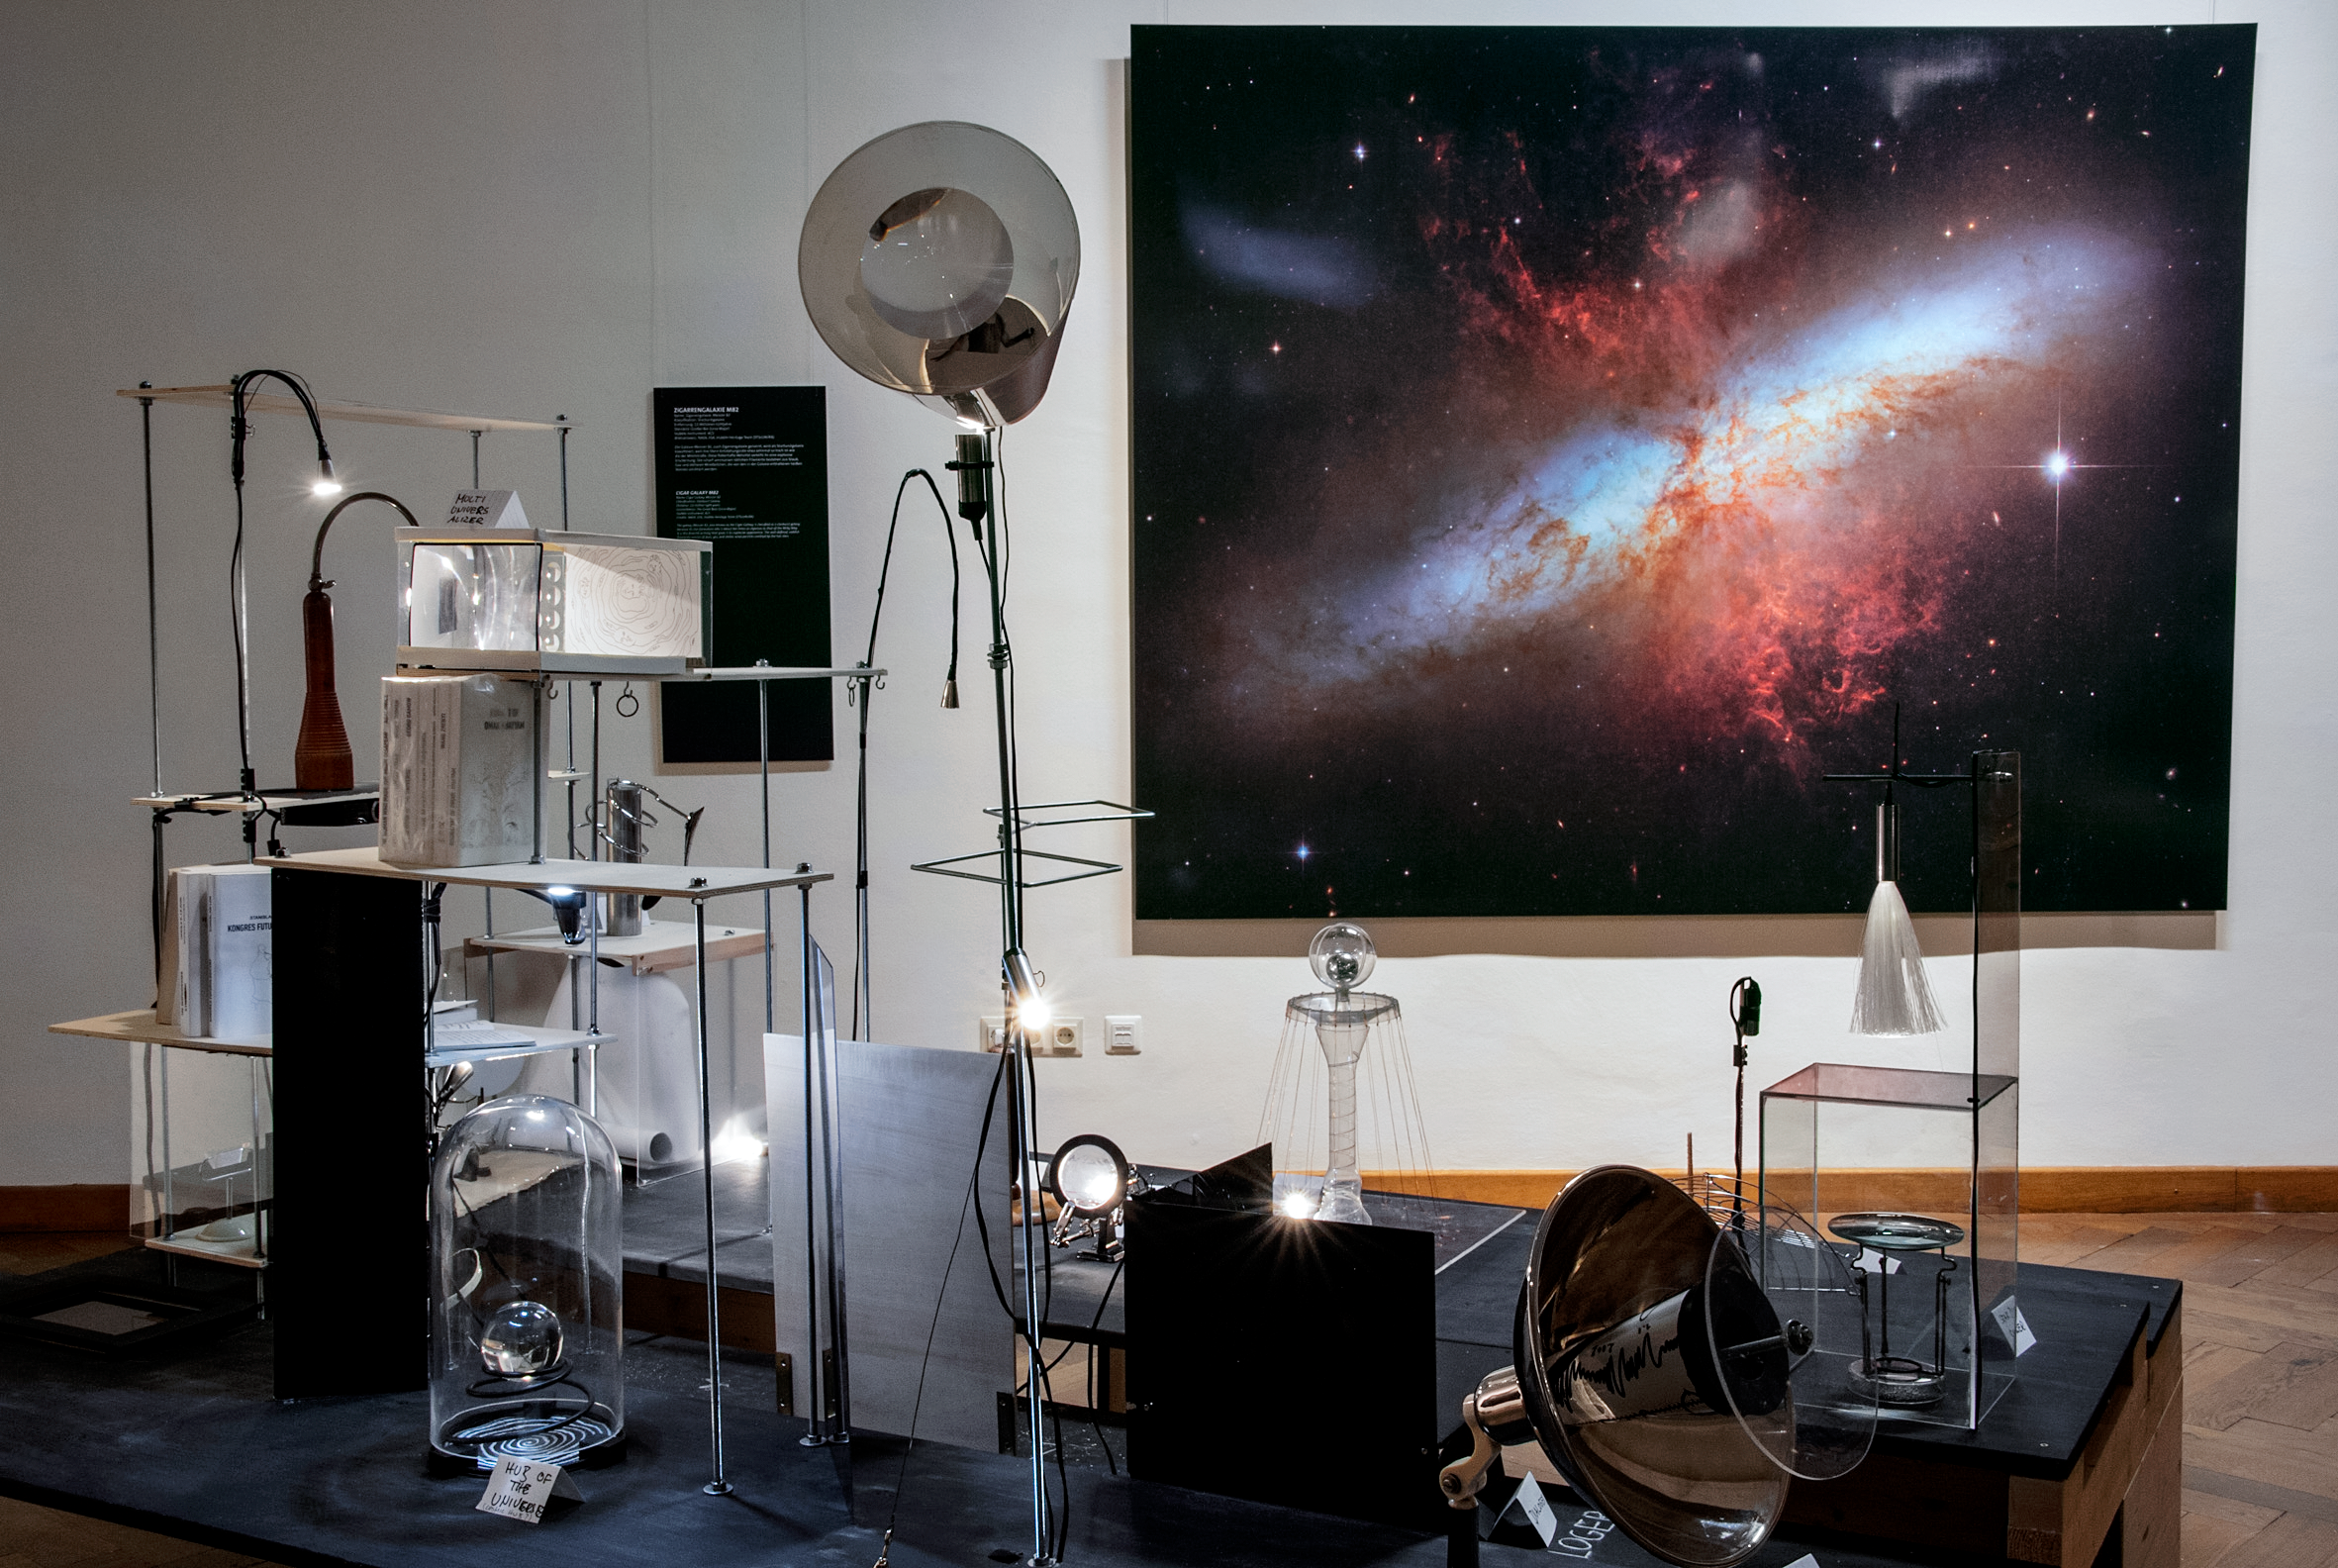

Our Place in Space — The Mirrored Universe

In the installation The Mirrored Universe artists Margit Busch and Solmaz Farhang construct a scenario in which a person has disappeared in a completely inexplicable way. Only a mysterious room, a small strange laboratory filled with strange equipment, was left behind. The only indication of what could have happened are measurements of unusual disturbances of electromagnetic waves in the centre of Vienna. The installation invites visitors to engage in the fictional story of this person, who apparently worked on nothing less than a reconstruction of the Universe: The investigators have recovered some of the instruments in the abandoned laboratory and are now trying to make sense of what they found. The results of these speculations are on display.

The installation was created for the Hubble travelling exhibition Our Place in Space in Vienna.

Credit: NHM Wien, Kurt Kracher